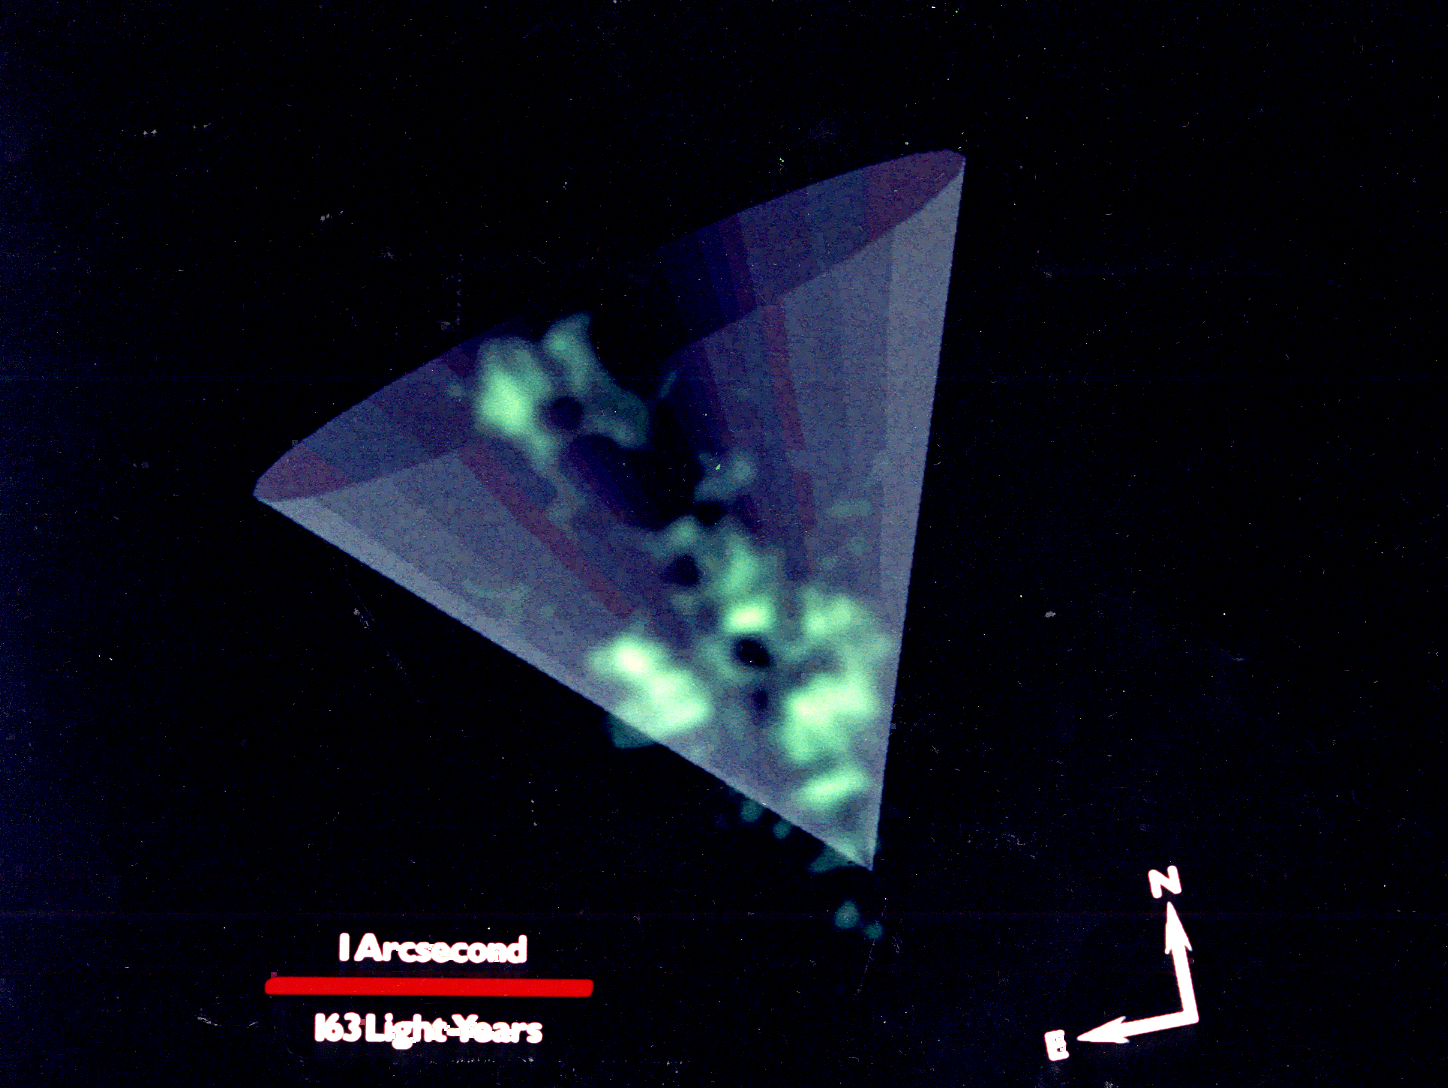

Hubble Space Telescope probes a galaxy with an active Nucleus

In this view of the core of galaxy NGC 1068, NASA/ESA Hubble Space Telescope reveals far more detail than has ever been seen from the ground. This picture was taken through a narrow band filter with HST's Wide Field and Planetary Camera (WFPC). The image was then computer processed to show additional detail in the clouds of ionized gas in the nucleus of NGC 1068. Clouds as small as 10 light-years across are clearly resolved in the central 150 light-years of the core. The clouds are glowing because they are caught in a "searchlight" of radiation beamed out of the galaxy's energetic nucleus, which may contain a massive black hole. A schematic representation of this invisible cone of ionizing radiation has been artificially added to the image to illustrate how radiation is beamed from the hidden nucleus.

Credit: NASA/ESA, H. Ford, and the Faint Object Spectrograph (FOS) Investigation Definition Team.